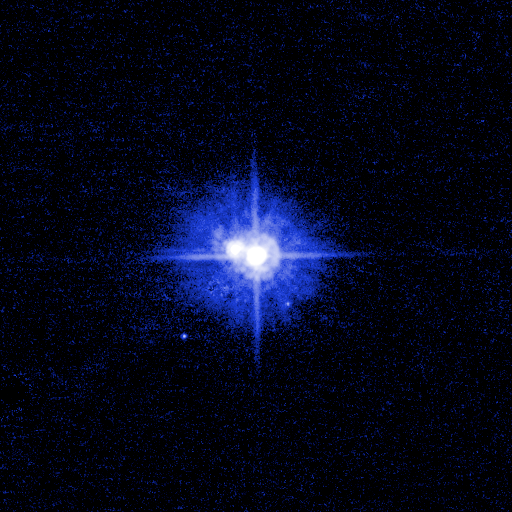

Pluto System: March 2, 2006 (Blue Filter)

This image (with filter applied) taken from the original black and white photo, and represents the range of brightness recorded by the ACS/HRC camera.

Credit: NASA, ESA, H. Weaver (Johns Hopkins University/Applied Physics Lab), A. Stern (Southwest Research Institute), and the HST Pluto Companion Search Team